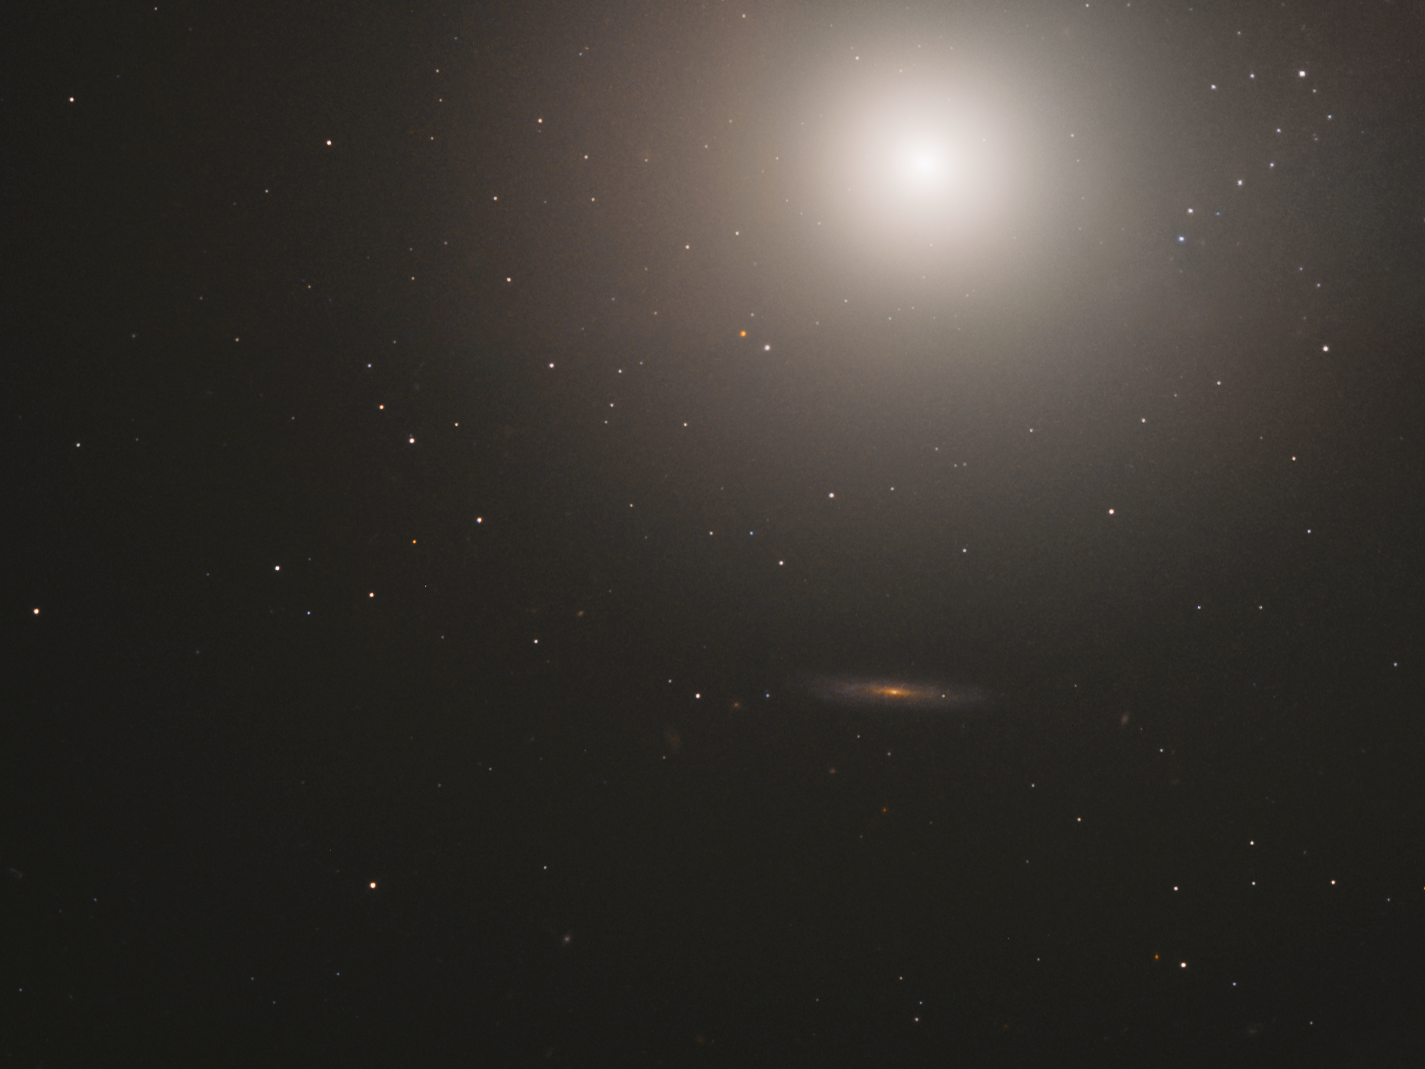

Messier Monday

This huge ball of stars — around 100 billion in total — is an elliptical galaxy located some 55 million light-years away from us. Known as Messier 89, this galaxy appears to be perfectly spherical; this is unusual for elliptical galaxies, which tend to be elongated ellipsoids. The apparently spherical nature of Messier 89 could, however, be a trick of perspective, and be caused by its orientation relative to the Earth.

Messier 89 is slightly smaller than the Milky Way, but has a few interesting features that stretch far out into the surrounding space. One structure of gas and dust extends up to 150 000 light-years out from the galaxy’s centre, which is known to house a supermassive black hole. Jets of heated particles reach out to 100 000 light-years from the galaxy, suggesting that Messier 89 may have once been far more active — perhaps an active quasar or radio galaxy — than it is now. It is also surrounded by an extensive system of shells and plumes, which may have been caused by past mergers with smaller galaxies — and implies that Messier 89 as we know it may have formed in the relatively recent past.

Messier 89 was discovered by astronomer Charles Messier in 1781, when Messier had been cataloguing astronomical objects for 23 years — ever since he mistook a faint object in the sky for Halley’s Comet. Upon closer inspection, he realised the object was actually the Crab Nebula. To prevent other astronomers from making the same error, he decided to catalogue all the bright, deep-sky objects that could potentially be mistaken for comets. His methodical observations of the night sky led to the first comprehensive catalogue of astronomical objects: the Messier catalogue! Messier 89 holds the record for being the last ever giant elliptical to be found by Messier, and the most perfectly spherical galaxy in the entire catalogue of 110 objects.

Credit: ESA/Hubble & NASA, S. Faber et al.